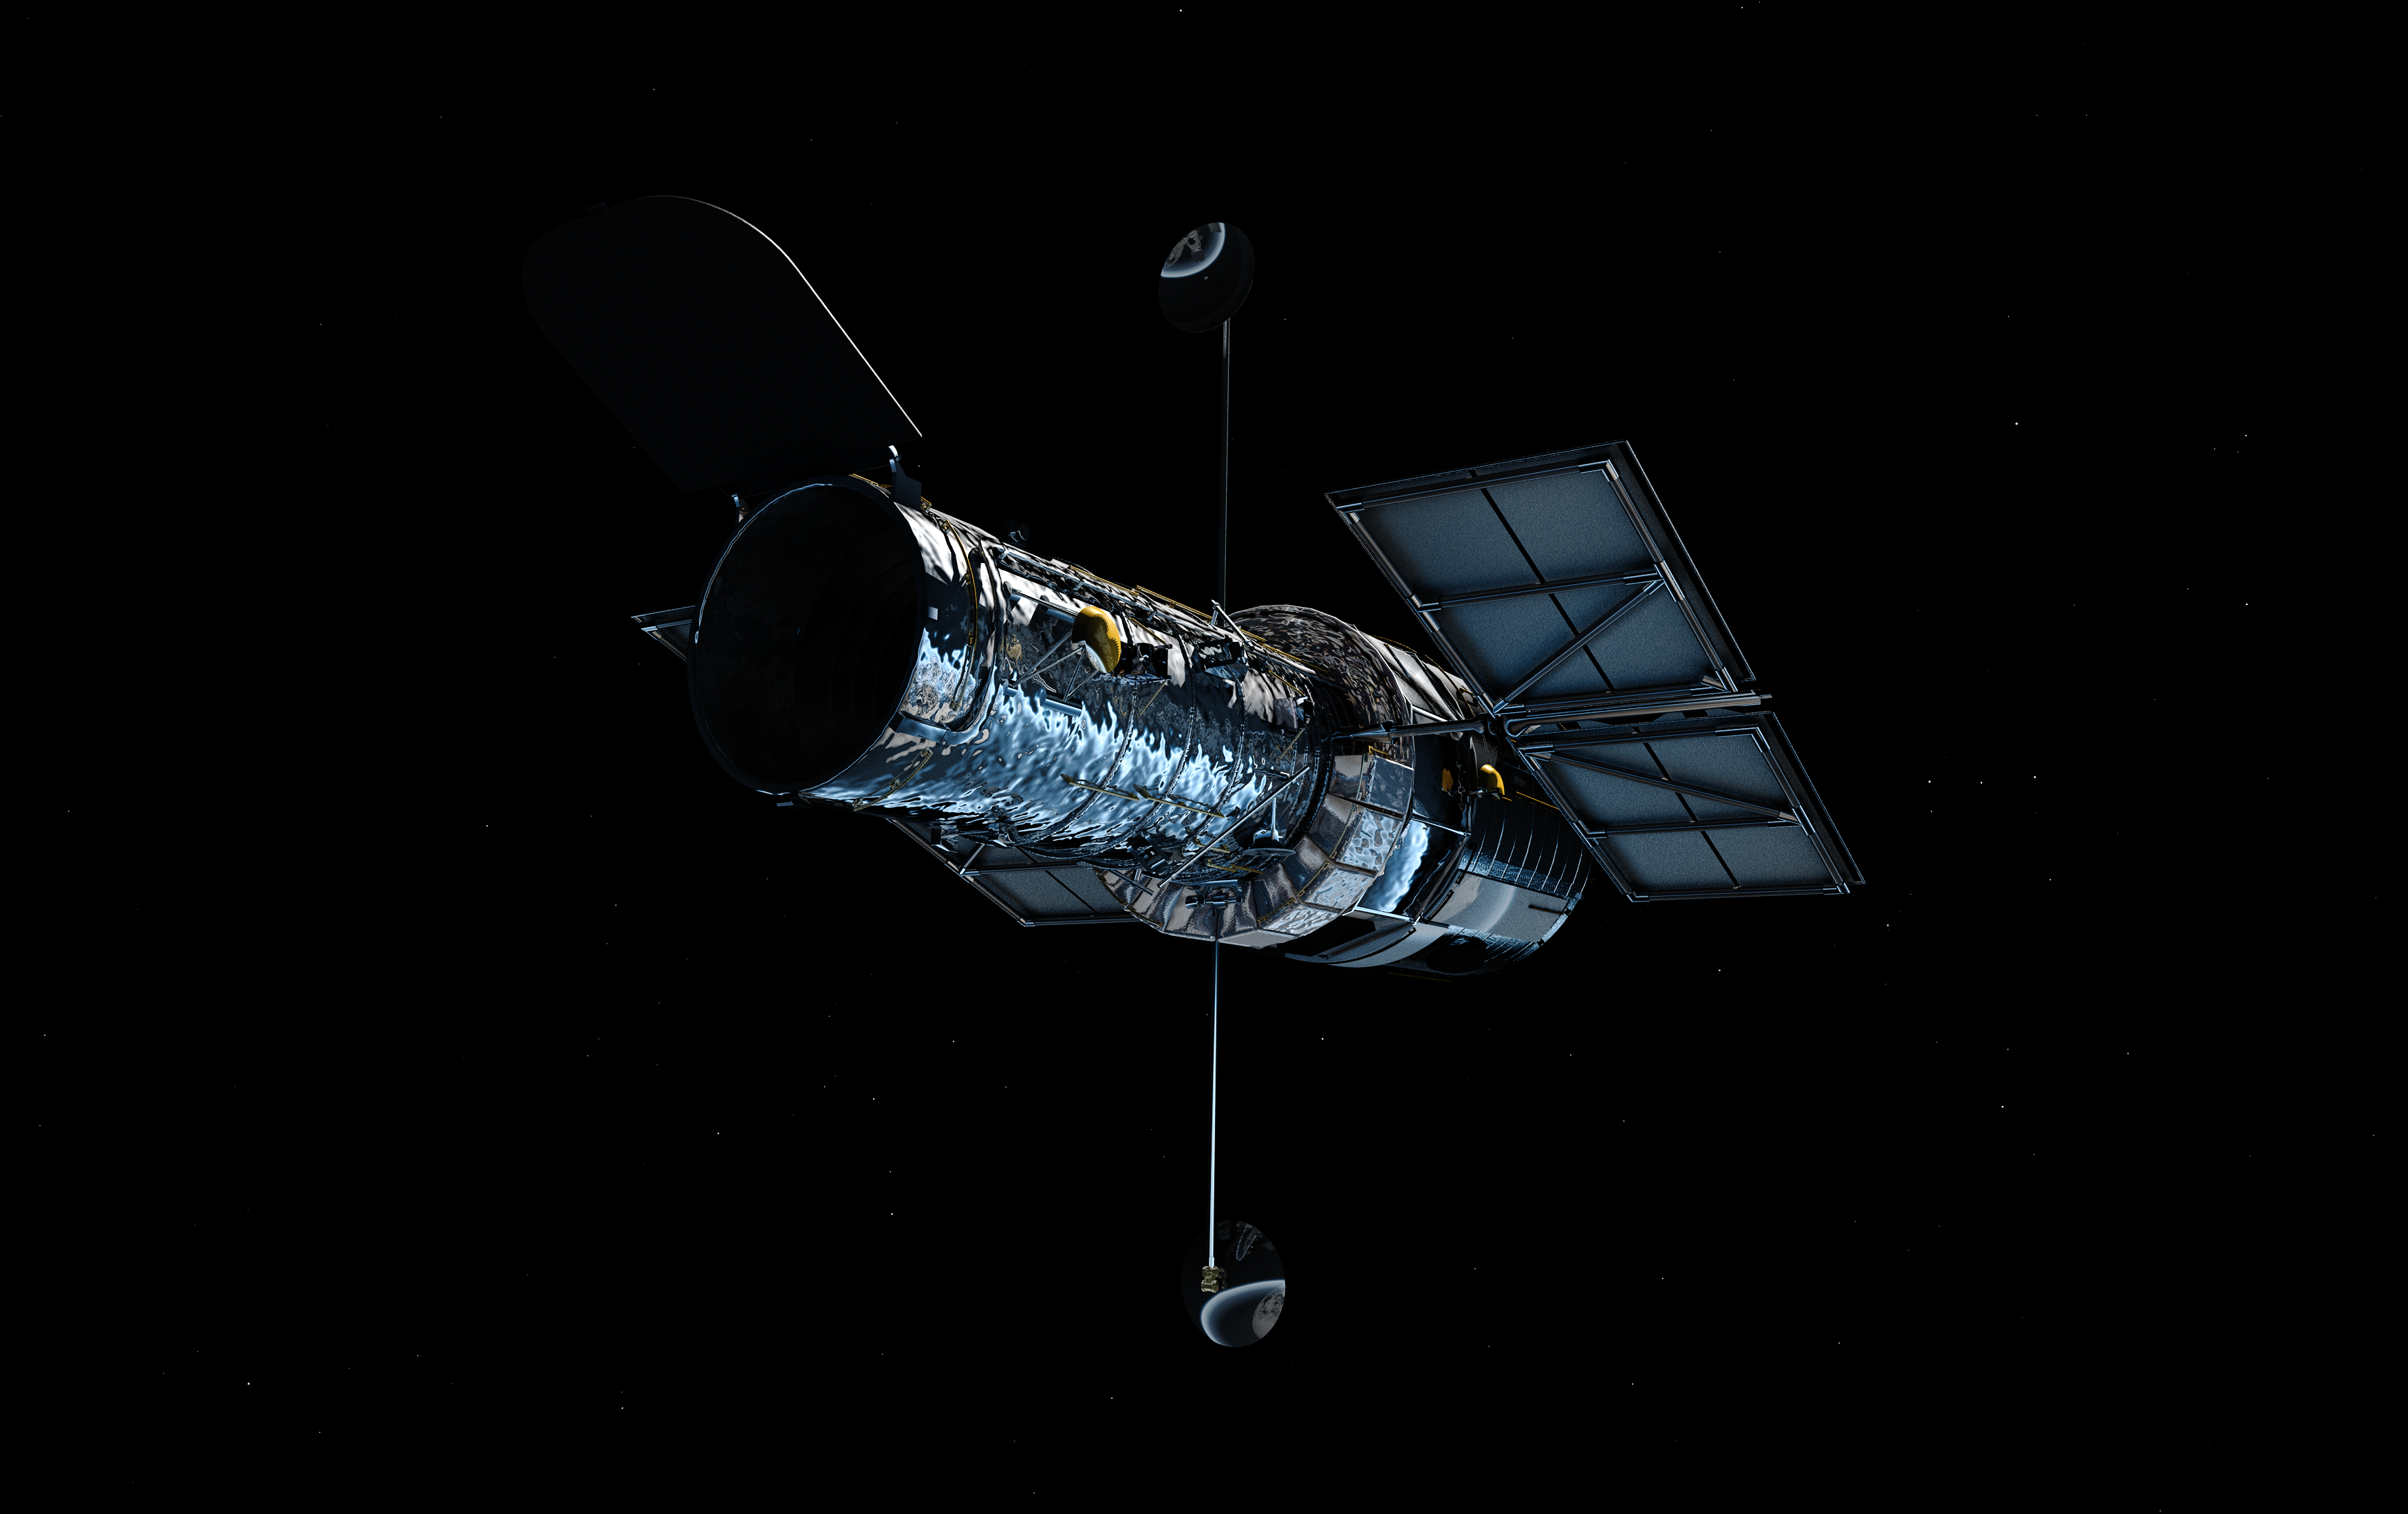

Hubble in orbit (artist's impression)

This artist's concept shows the NASA/ESA Hubble Space Telescope in orbit around the Earth. The telescope's current appearance is the result both of its original design, and the modifications made during five servicing missions. In particular, the most recent set of solar panels, visible here, substantially changed the appearance of the telescope when they were installed during Servicing Mission 3B in 2002. They are smaller than the older panels, and produce significantly more power.

Credit: ESA/Hubble (M. Kornmesser)